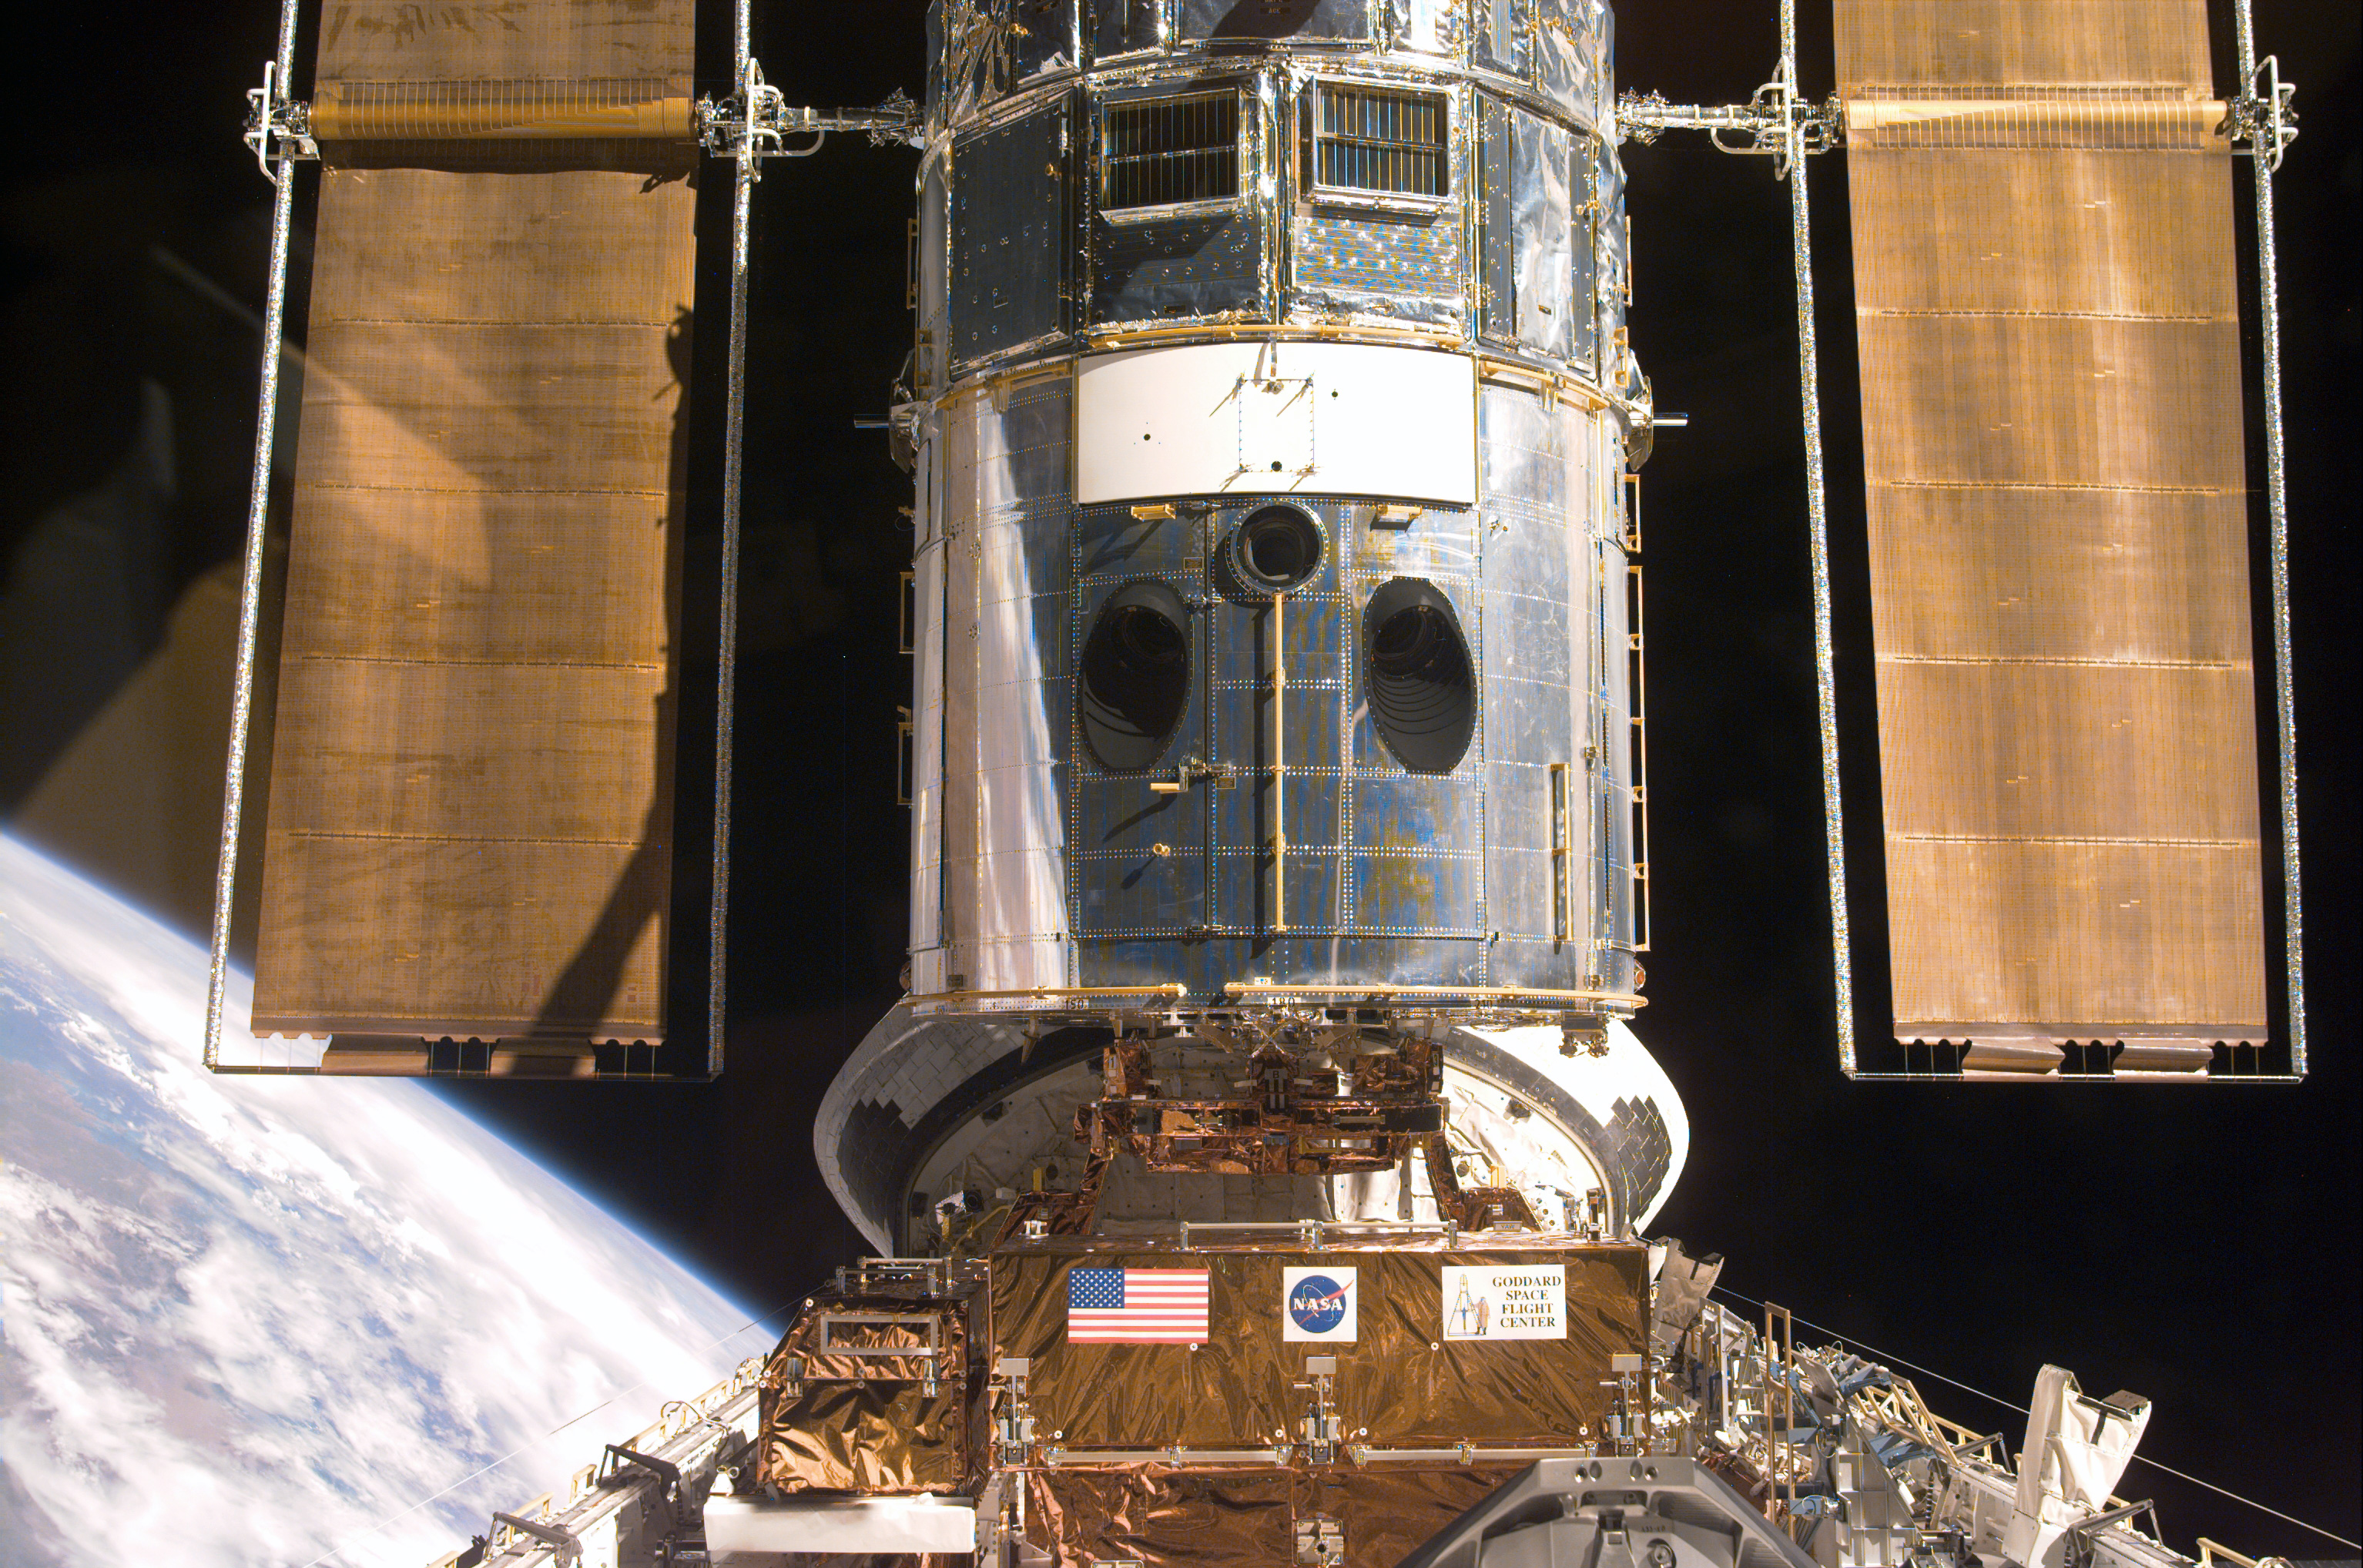

SM3A: Hubble Captured in the Discovery Cargo Bay

This electronic still camera's view and others in this series showing the Hubble Space Telescope (HST) being berthed in Discovery's bay were recorded during and soon after capture.

Credit: NASA/ESA